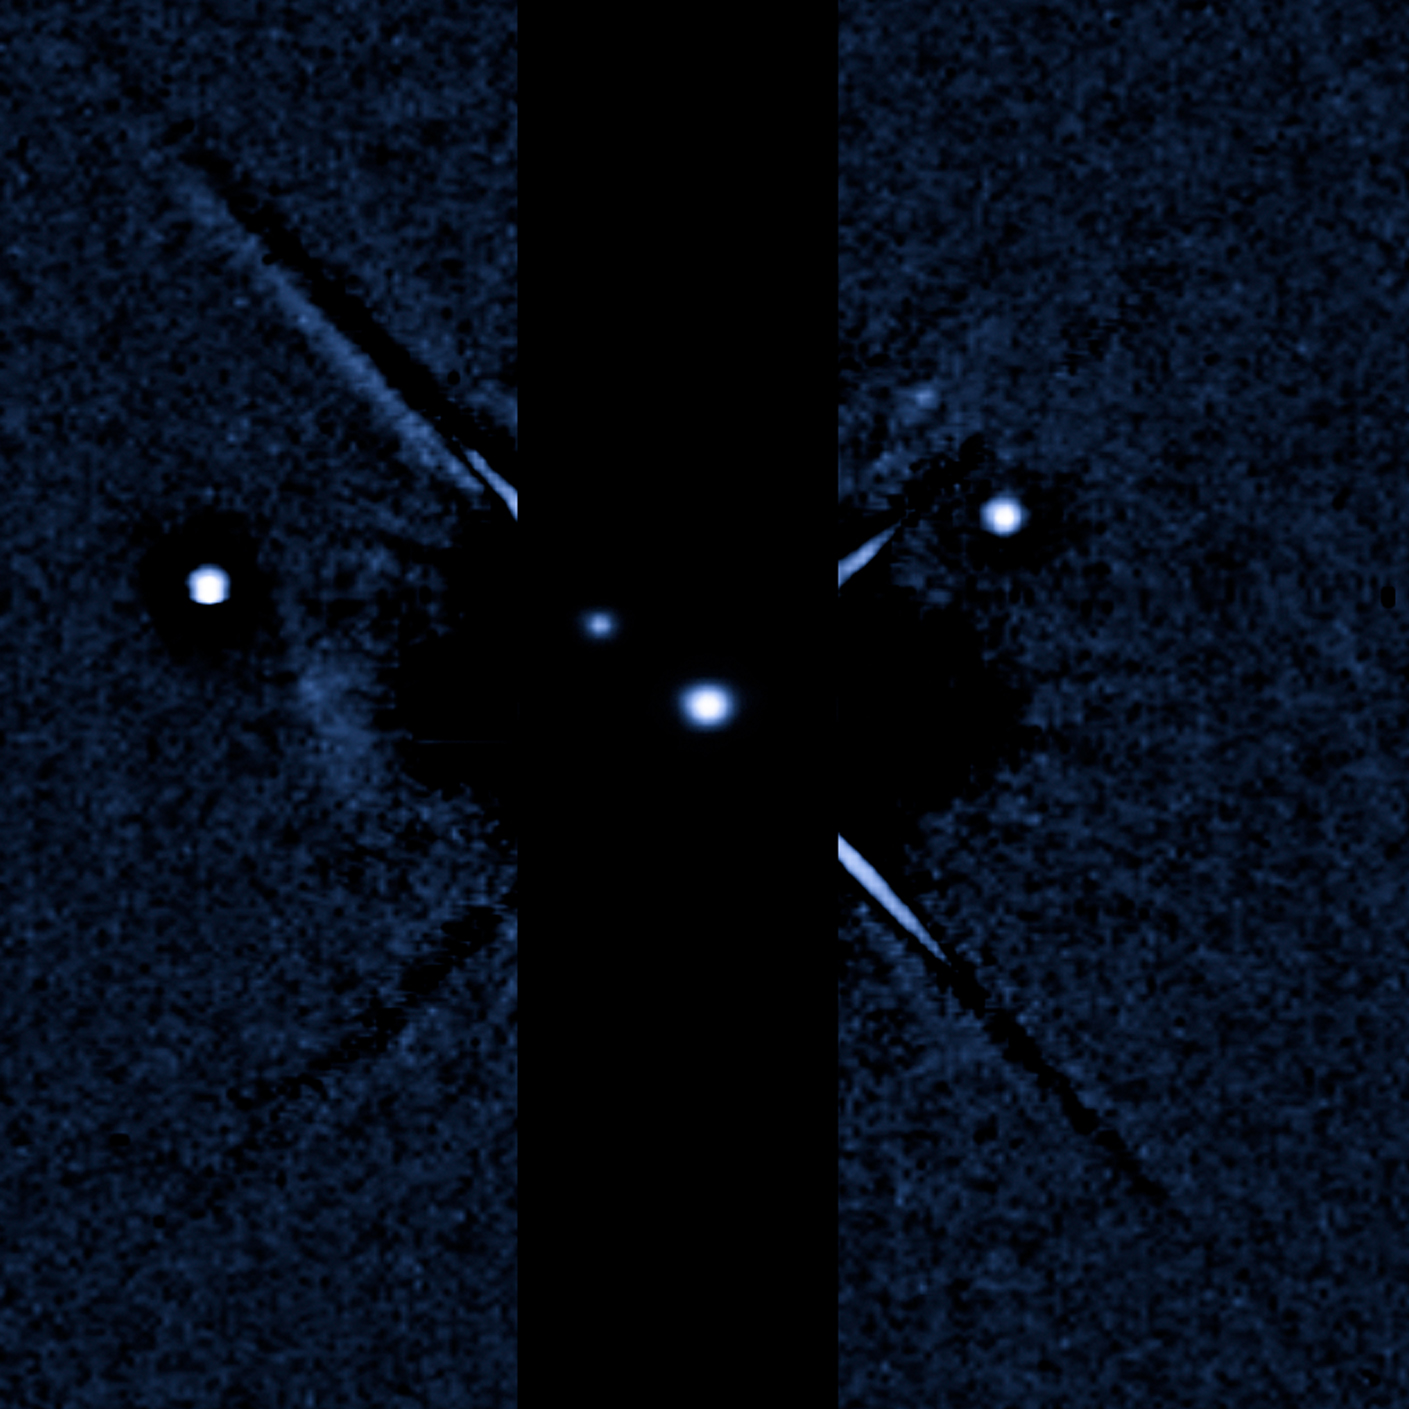

Pluto: 3 July 2011

Pluto: 3 July 2011 (WFC/UVIS)

Credit: NASA & ESA